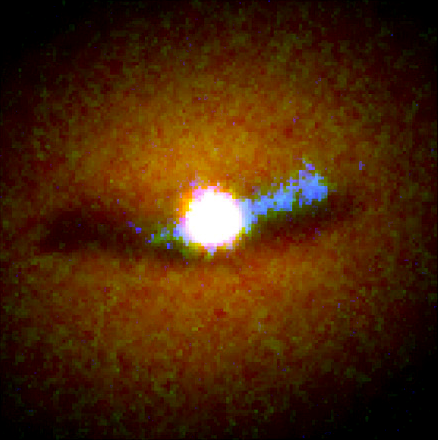

Galaxy NGC 6251 Nucleus

This composite image of the core of the galaxy was constructed by combining a visible light image taken with Hubble's Wide Field Planetary Camera 2 (WFPC2), with a separate image taken in ultraviolet light with the Faint Object Camera (FOC). While the visible light image shows a dark dust disk, the ultraviolet image (color-coded blue) shows a bright feature along one side of the disk. Because Hubble sees ultraviolet light reflected from only one side of the disk, astronomers conclude the disk must be warped like the brim of a hat. The bright white spot at the image's centre is light from the vicinity of the black hole which is illuminating the disk.

Credit: Philippe Crane (European Southern Observatory), and NASA/ESA